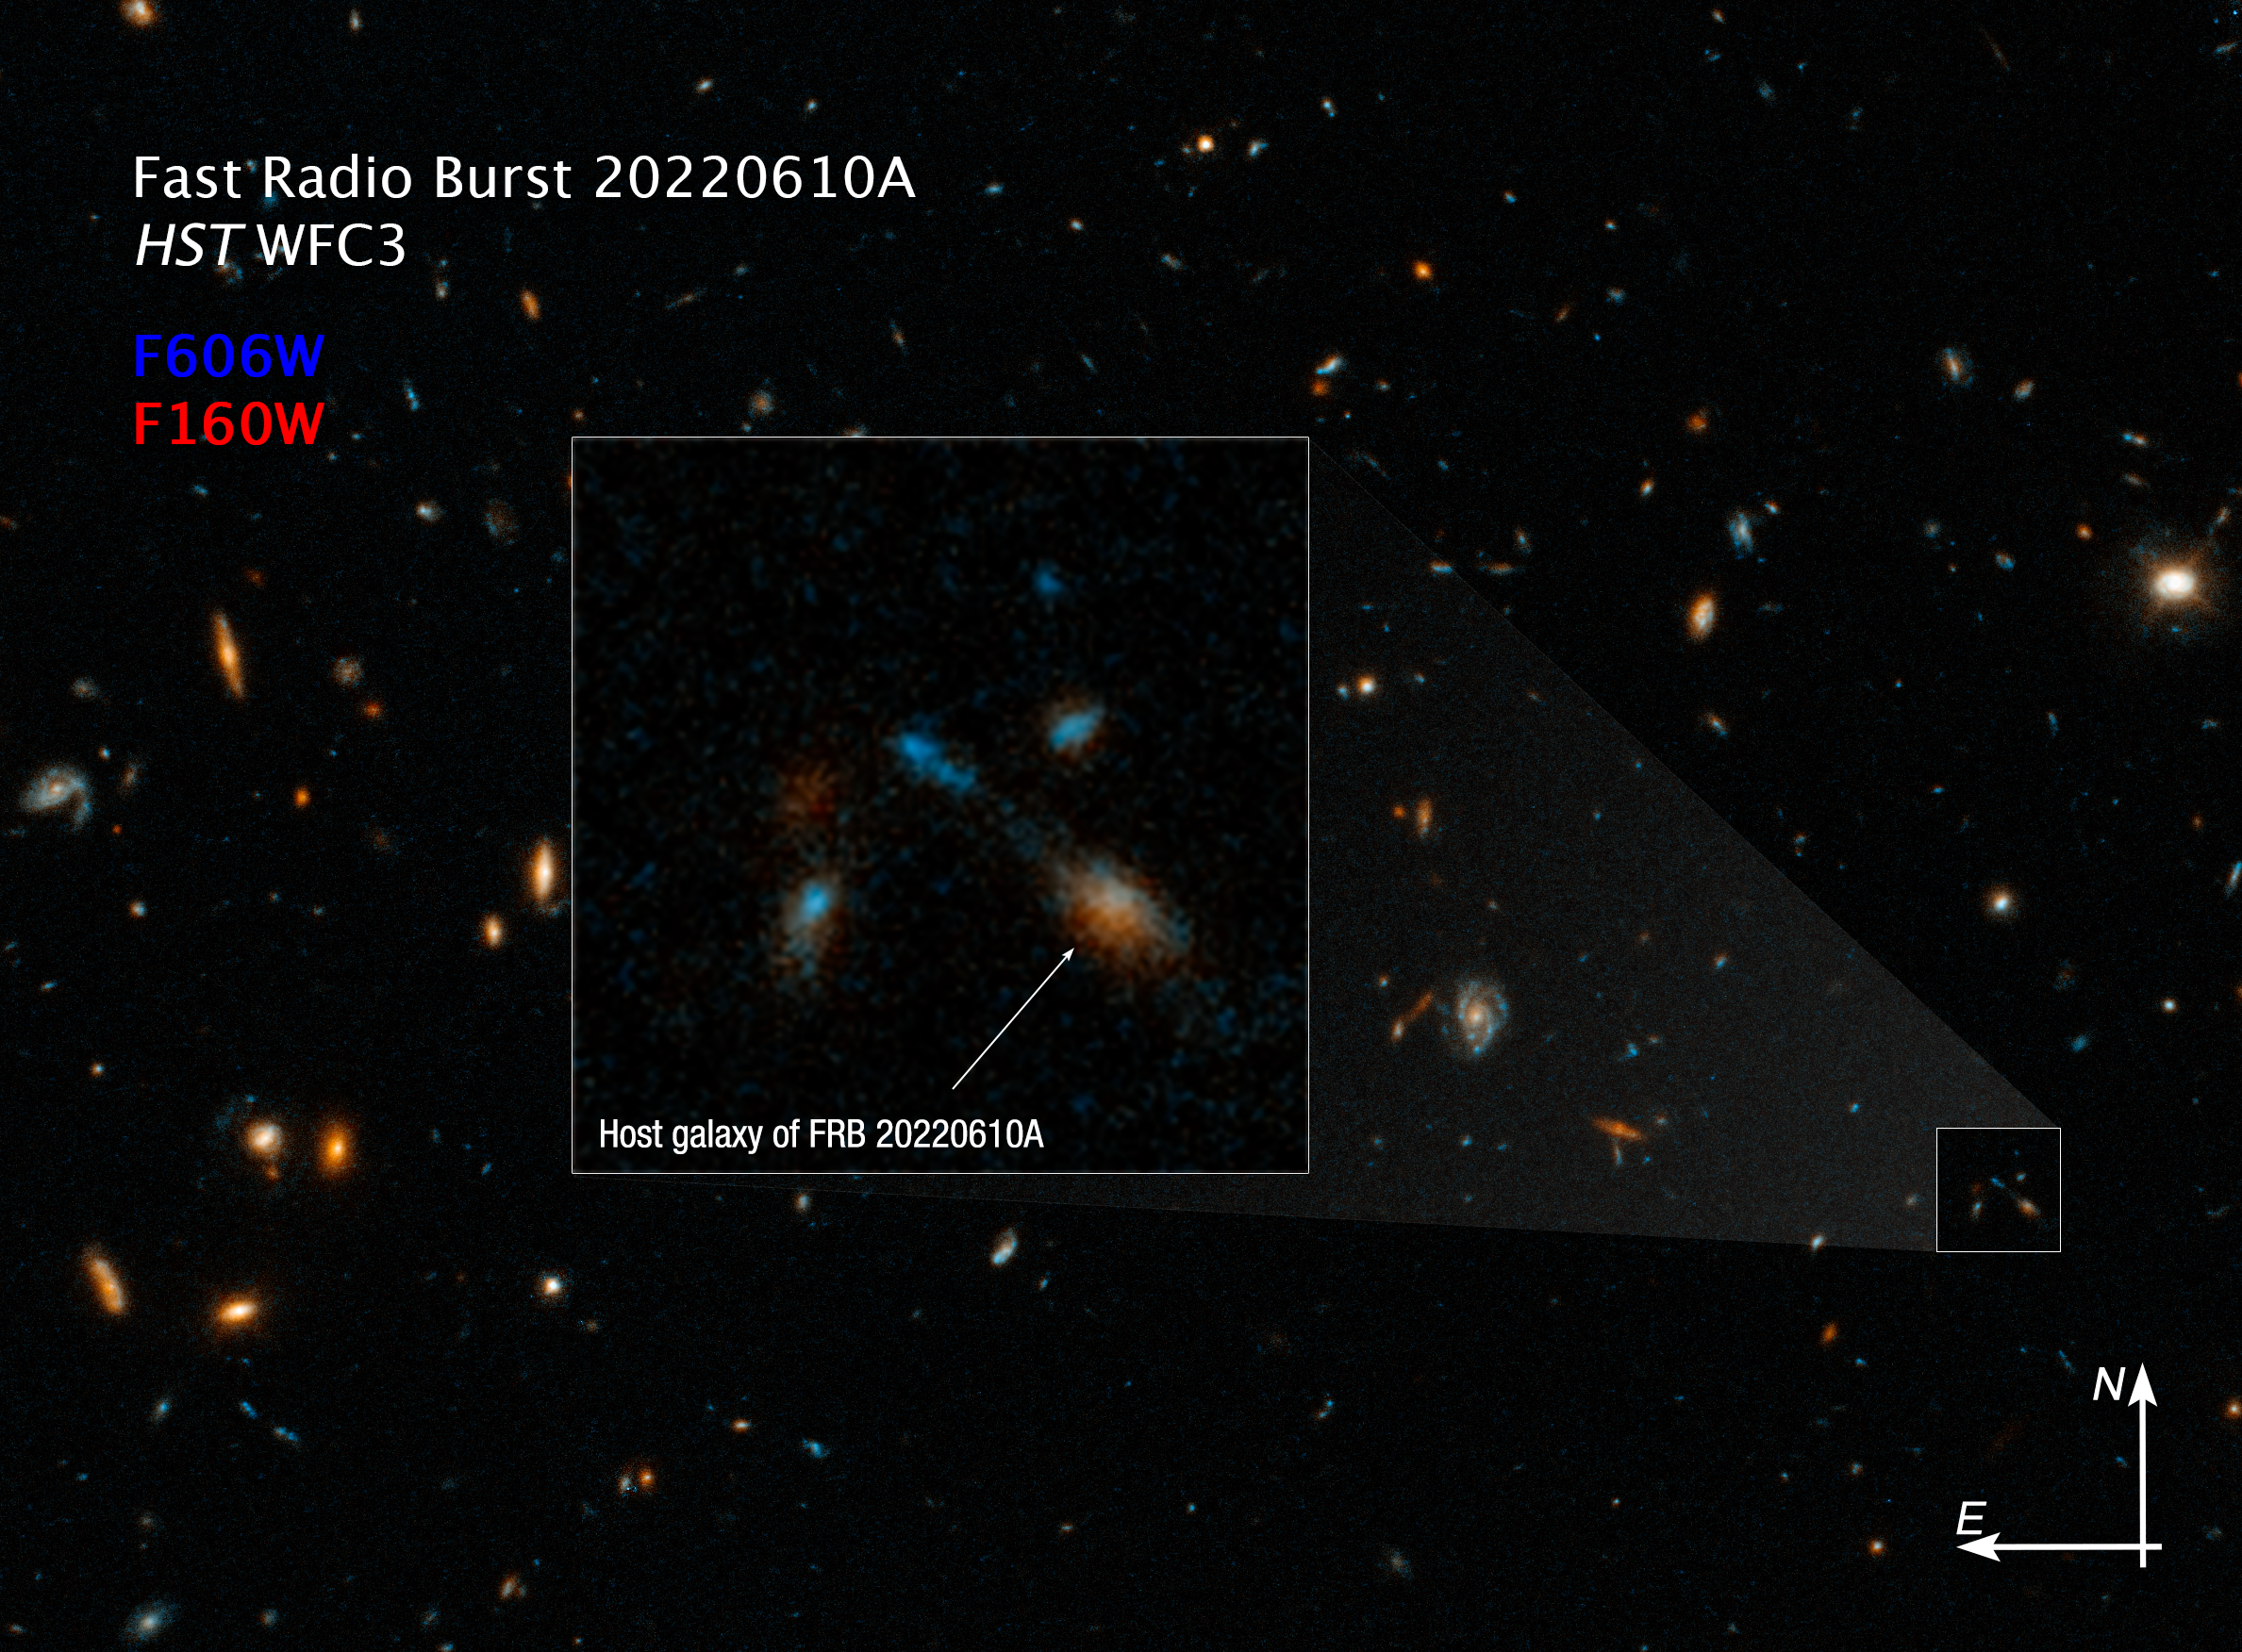

Hubble photographs home of farthest fast radio burst (compass image)

A Hubble Space Telescope image of the host galaxy of an exceptionally powerful Fast Radio Burst, FRB20220610A. Hubble’s sensitivity and sharpness reveals a compact group of multiple galaxies that may be in the process of merging. They existed when the Universe was only 5 billion years old. FRB 20220610A was first detected on June 10, 2022 by the Australian Square Kilometre Array Pathfinder (ASKAP) radio telescope in Western Australia, and confirmed to come from a distant origin by the European Southern Observatory’s Very Large Telescope in Chile.

Credit: NASA, ESA, STScI, Alexa Gordon (Northwestern University)